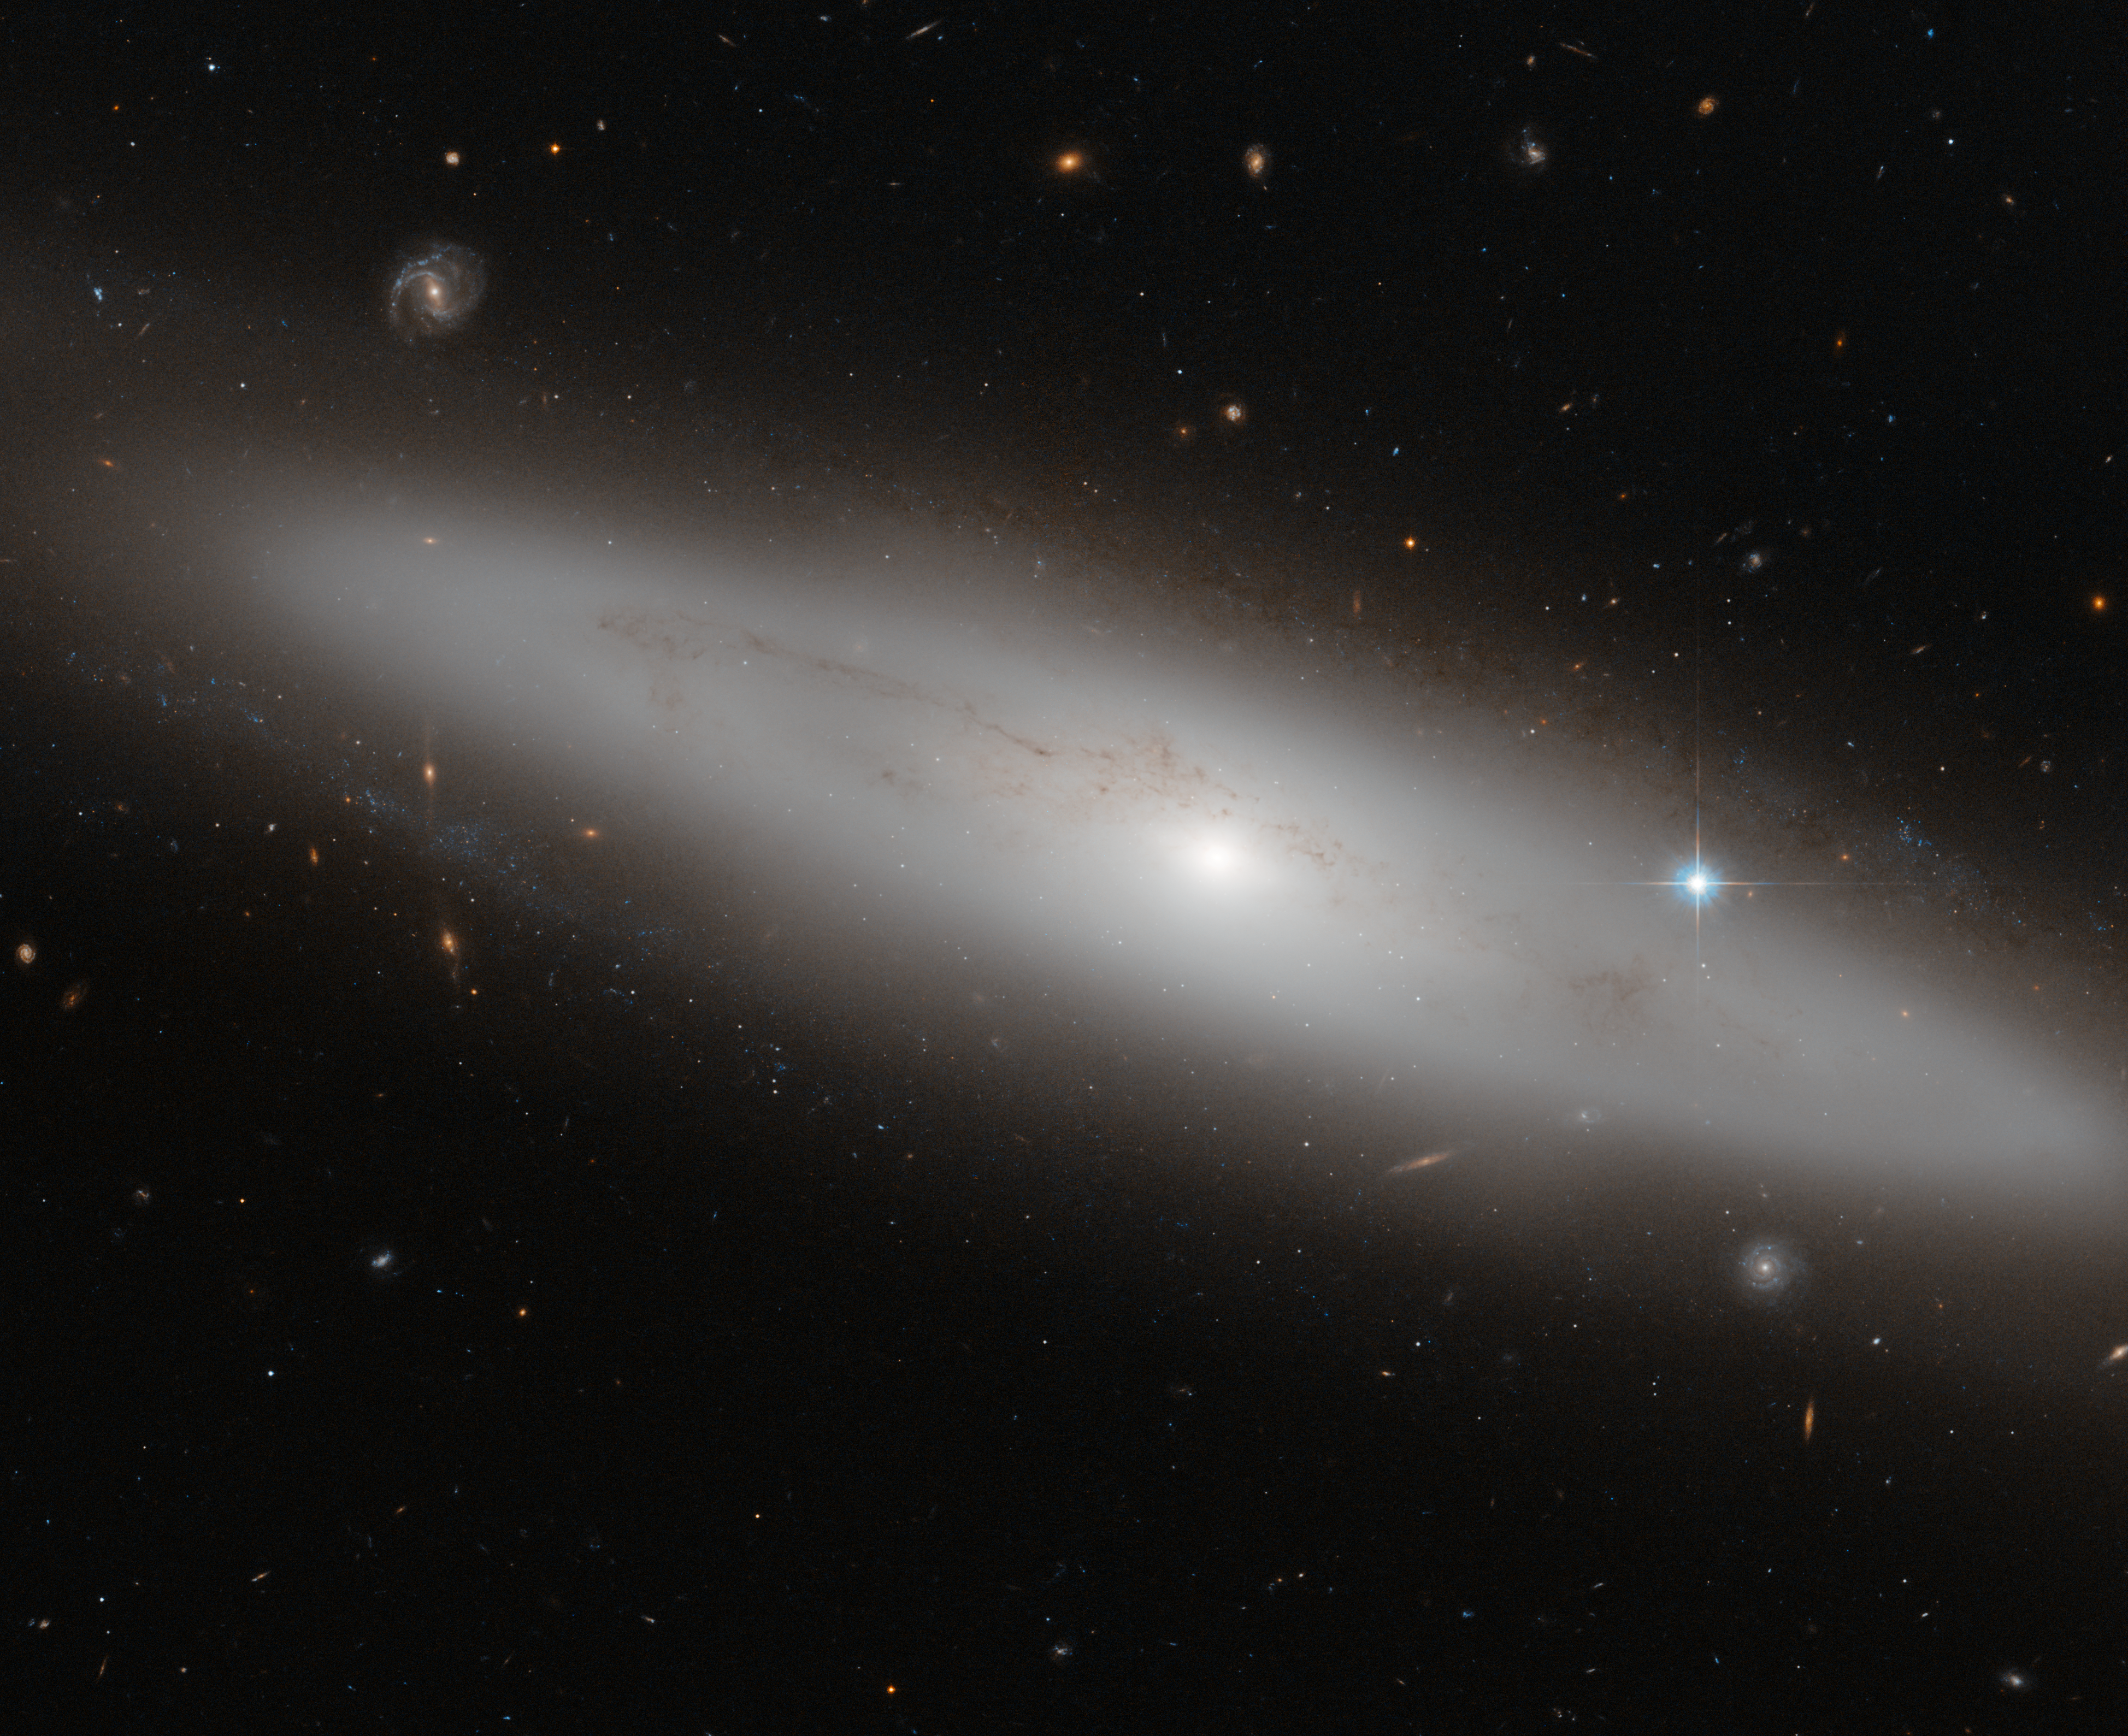

A stranger in the crowd

The constellation of Virgo (The Virgin) is the largest of the Zodiac constellations, and the second largest overall after Hydra (The Water Snake). Its most appealing feature, however, is the sheer number of galaxies that lie within it. In this picture, among a crowd of face- and edge-on spiral, elliptical, and irregular galaxies, lies NGC 4866, a lenticular galaxy situated about 80 million light-years from Earth.

Lenticular galaxies are somewhere between spirals and ellipticals in terms of shape and properties. From the picture, we can appreciate the bright central bulge of NGC 4886, which contains primarily old stars, but no spiral arms are visible. The galaxy is seen from Earth as almost edge-on, meaning that the disc structure — a feature not present in elliptical galaxies — is clearly visible. Faint dust lanes trace across NGC 4866 in this image, obscuring part of the galaxy’s light.

To the right of the galaxy is a very bright star that appears to lie within NGC 4886’s halo. However, this star actually lies much closer to us; in front of the galaxy, along our line of sight. These kinds of perspective tricks are common when observing, and can initially deceive astronomers as to the true nature and position of objects such as galaxies, stars, and clusters.

This sharp image of NGC 4866 was captured by the Advanced Camera for Surveys, an instrument on the NASA/ESA Hubble Space Telescope. A version was entered into the Hubble’s Hidden Treasures image processing competition by contestant Gilles Chapdelaine.

Credit: ESA/Hubble & NASA Acknowledgement: Gilles Chapdelaine